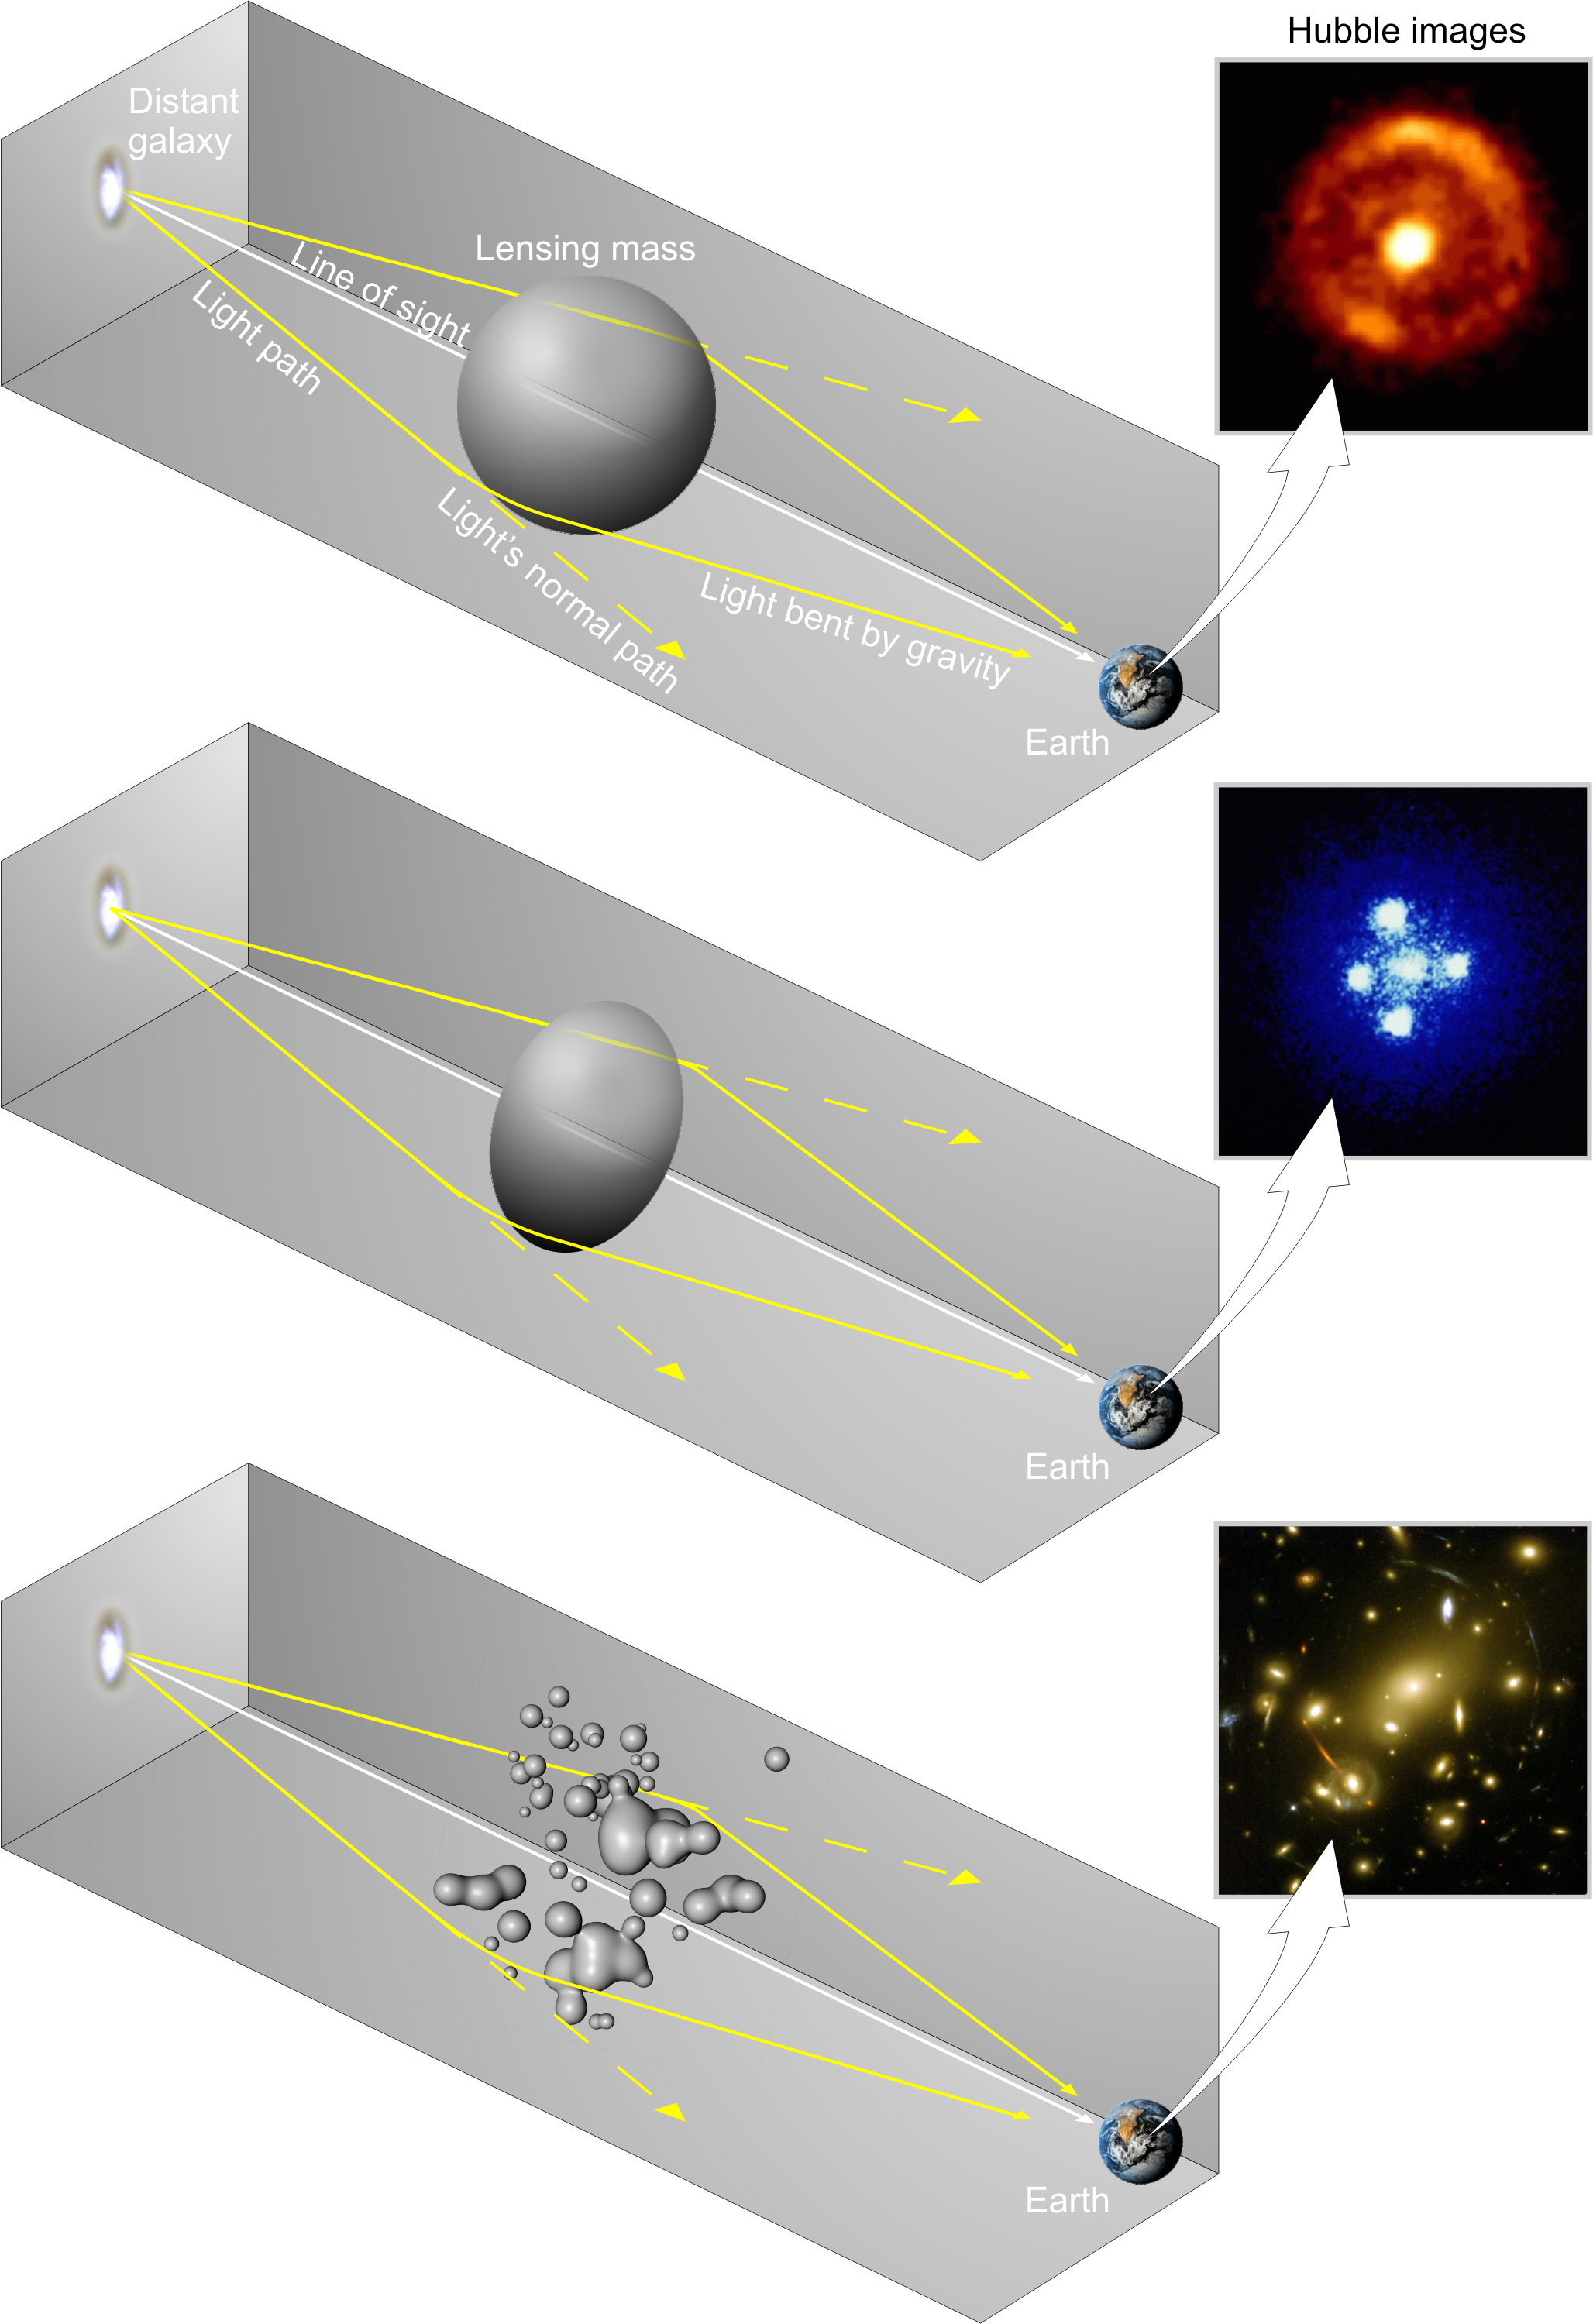

Different types of gravitational lenses

Gravitational lenses produce different shaped images depending on the shape of the lensing body. If the lens is spherical then the image appears as an Einstein ring (in other words as a ring of light) (top); if the lens is elongated then the image is an Einstein cross (it appears split into four distinct images) (middle), and if the lens is a galaxy cluster, like Abell 2218, then arcs and arclets (banana-shaped images) of light are formed (bottom).

Credit: European Space Agency.